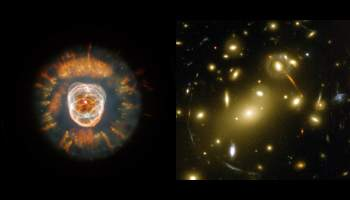

NGC 2392 and Abell 2218

These are the Early Release Observations following a successful Servicing Mission 3A.

Credit: NASA & ESA